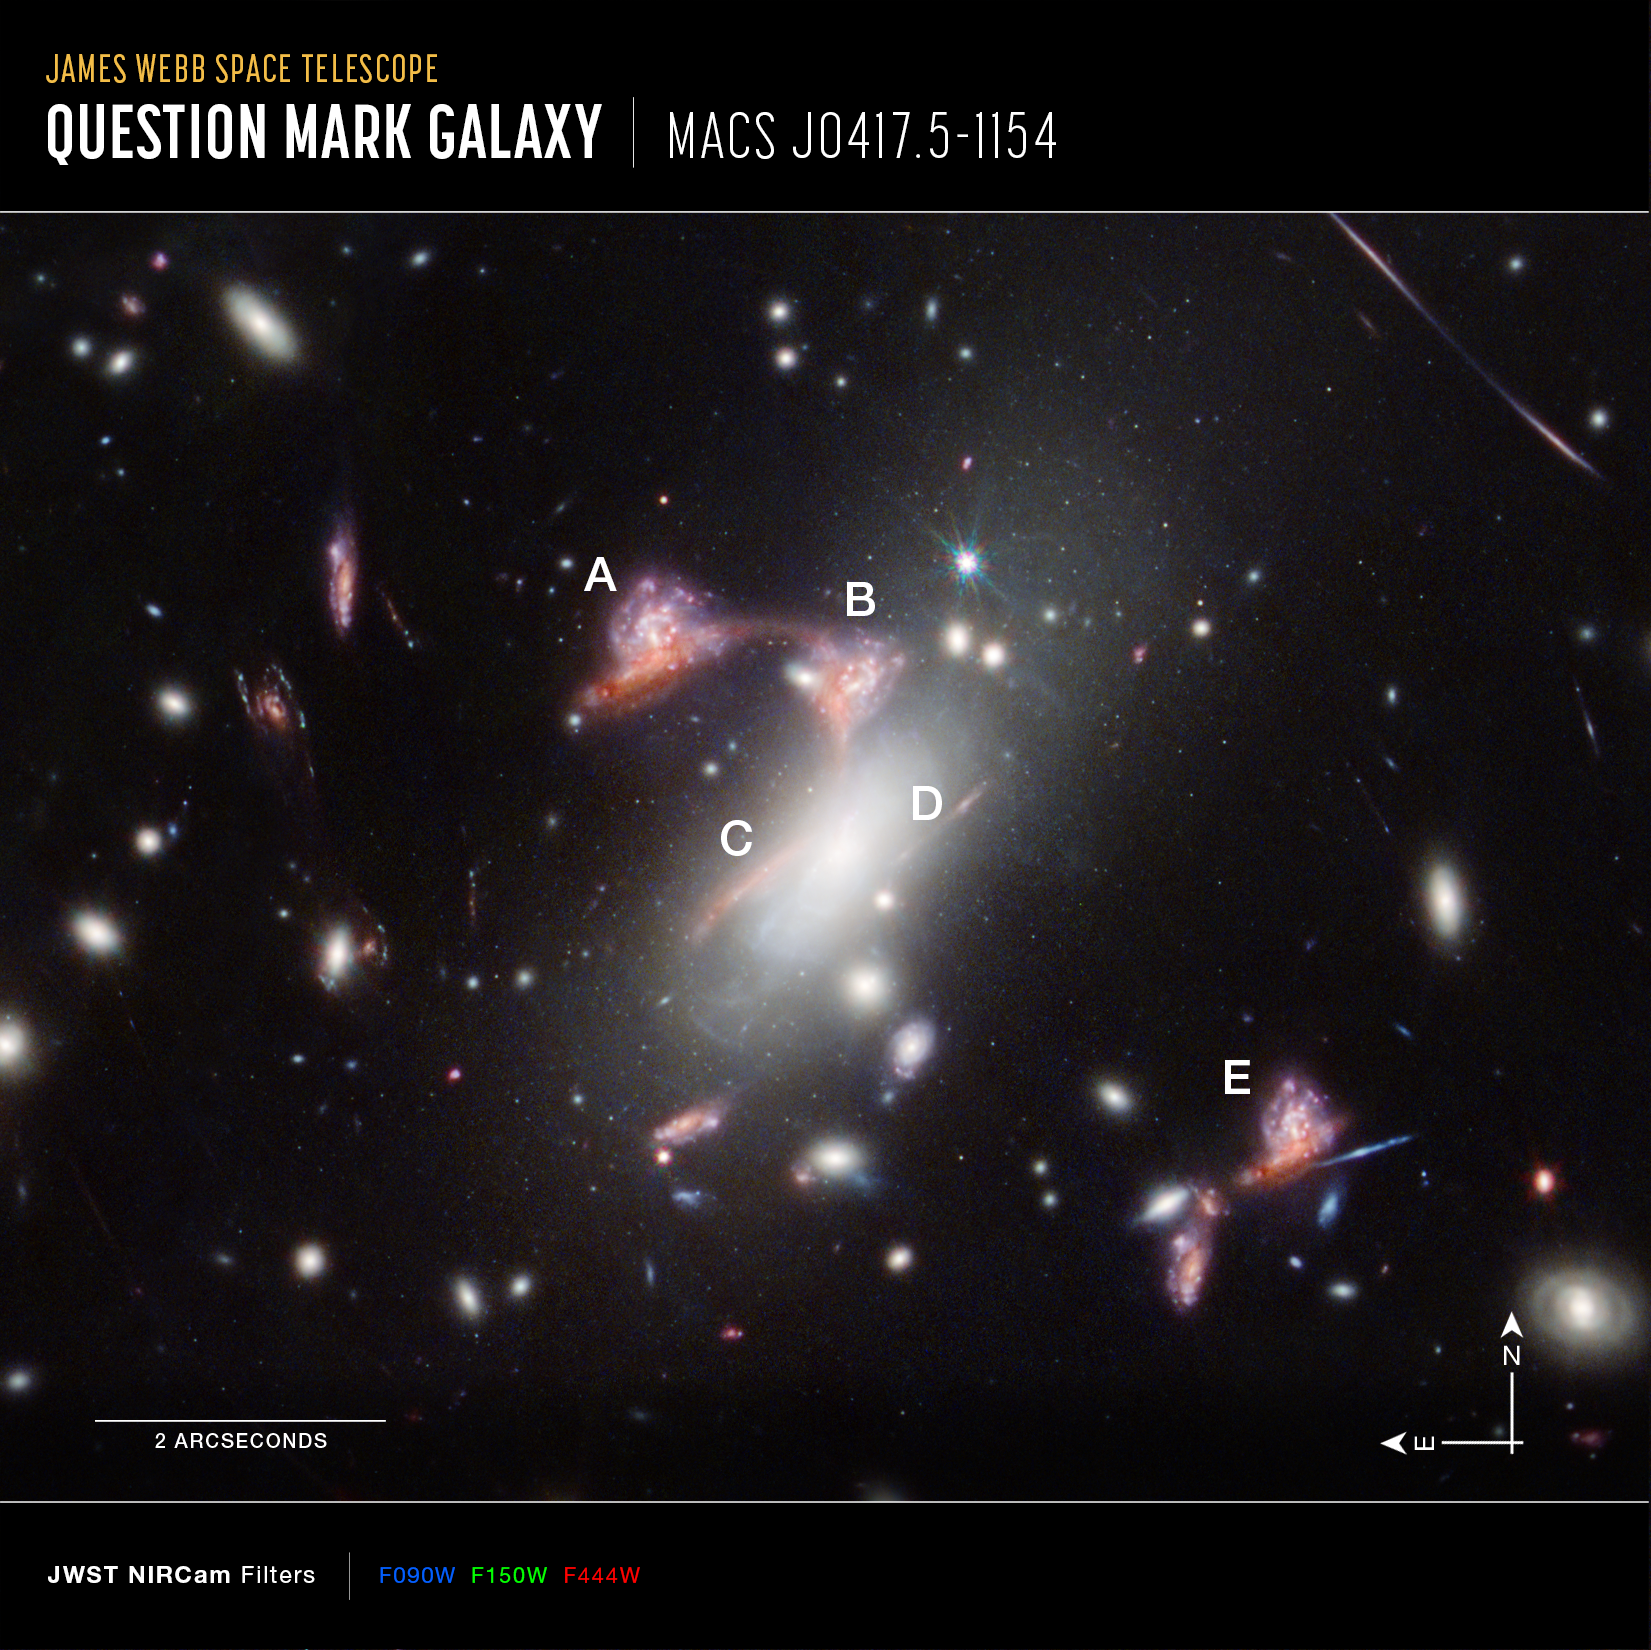

Question Mark Galaxy, annotated (NIRCam Compass Image)

A specific type of gravitational lensing known to astronomers as hyperbolic umbilic, captured in the James Webb Space Telescope’s image of galaxy cluster MACS-J0417.5, results in the optical illusion of five multiples of one distant galaxy pair, labelled here as A, B, C, D, and E. While the pair exists once in reality, it appears five times when viewed through the funhouse mirror of warped space created by the mass of the cluster. Image D is largely obscured behind the bright white glare of one of the cluster galaxies.

This image also includes compass arrows, scale bar, and colour key for reference. The scale bar is labelled in arcseconds, which is a measure of angular distance on the sky. There are 60 arcminutes in a degree and 60 arcseconds in an arcminute. (The full Moon has an angular diameter of about 30 arcminutes.) The actual size of an object that covers one arcsecond on the sky depends on its distance from the telescope.

This image shows infrared wavelengths of light that have been translated into visible-light colours. The colour key at the bottom of the image shows which filters from Webb’s NIRCam (Near-Infrared Camera) instrument were used. The colour of each filter name is the visible light colour assigned to represent the infrared light detected by that filter.

Credit: NASA, ESA, CSA, STScI, V. Estrada-Carpenter (Saint Mary’s University)